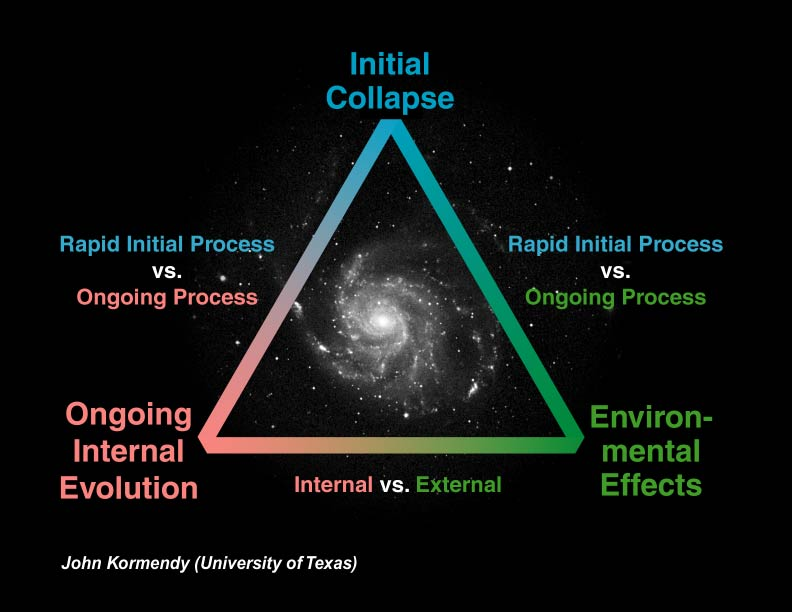

Possible galaxy evolution processes

This diagram shows some possible galaxy evolution processes, derived from a scientific study done using Hubble Space Telescope, in 1999.

Credit: John Kormendy (University of Texas)